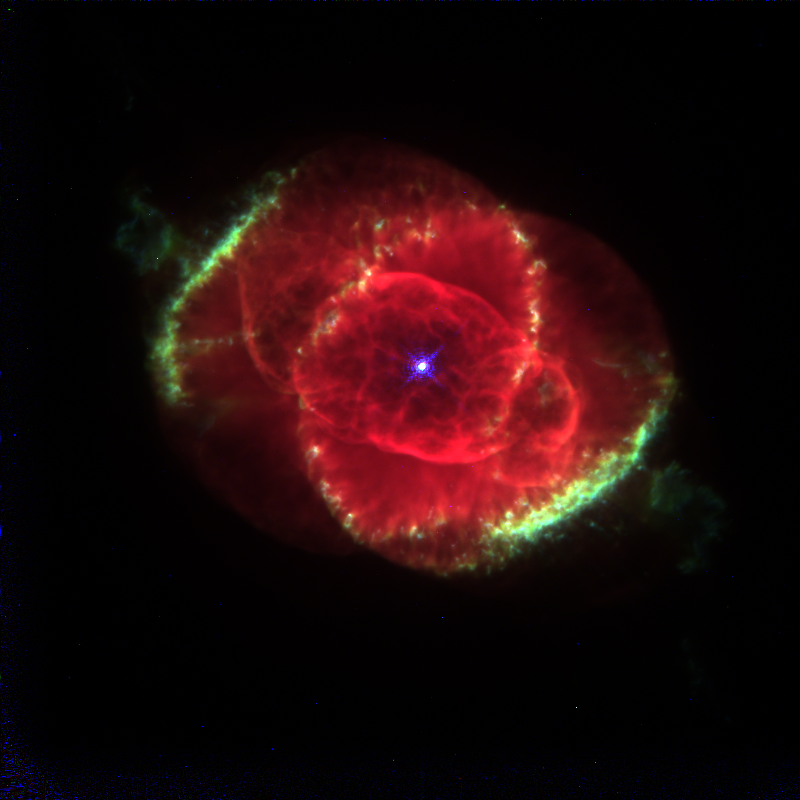

The Cat's Eye Nebula

This Hubble Space Telescope image shows one of the most complex planetary nebulae ever seen, NGC 6543, nicknamed the 'Cat's Eye Nebula.' Hubble reveals surprisingly intricate structures including concentric gas shells, jets of high-speed gas and unusual shock-induced knots of gas. Estimated to be 1, 000 years old, the nebula is a visual 'fossil record' of the dynamics and late evolution of a dying star.

Credit: J.P. Harrington and K.J. Borkowski (University of Maryland), and NASA/ESA